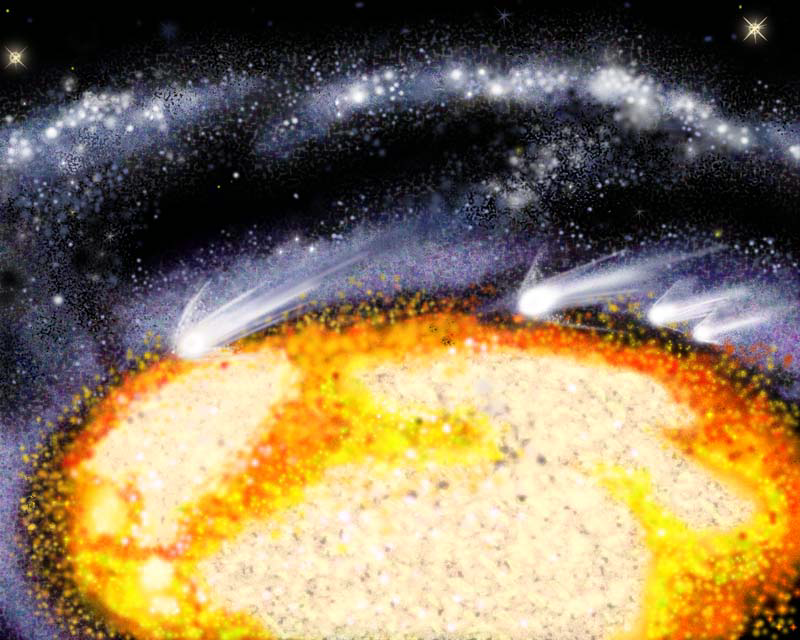

Illustration of Comet-Like Objects Racing Through the Cartwheel Galaxy's Core

This artist's illustration offers a 'window seat' view of comet-like clouds of gas racing through the heart of the Cartwheel galaxy at 700, 000 mph.

The large orange and yellow pancake-like object is the galaxy's core, and the white streaks along its edges are the comet-like objects. The objects probably were spawned by a collision between high-speed and slow-moving material.

Credit: J. Gitlin ( Space Telescope Science Institute), and NASA/ESA